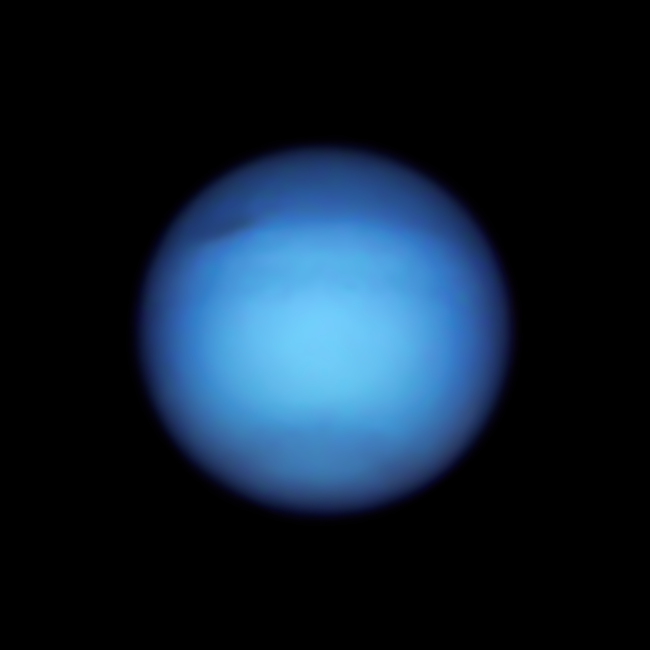

Hubble’s Observation of Neptune in 2021

In observations taken on 7 September 2021, researchers found that Neptune’s dark spot, which recently was found to have reversed course from moving toward the equator, is still visible in this image, along with a darkened northern hemisphere. There is also a notable dark, elongated circle encompassing Neptune’s south pole. The blue colour of both Neptune and Uranus is a result of the absorption of red light by the planets’ methane-rich atmospheres.

Credit: NASA, ESA, A. Simon (Goddard Space Flight Center), and M.H. Wong (University of California, Berkeley) and the OPAL team.